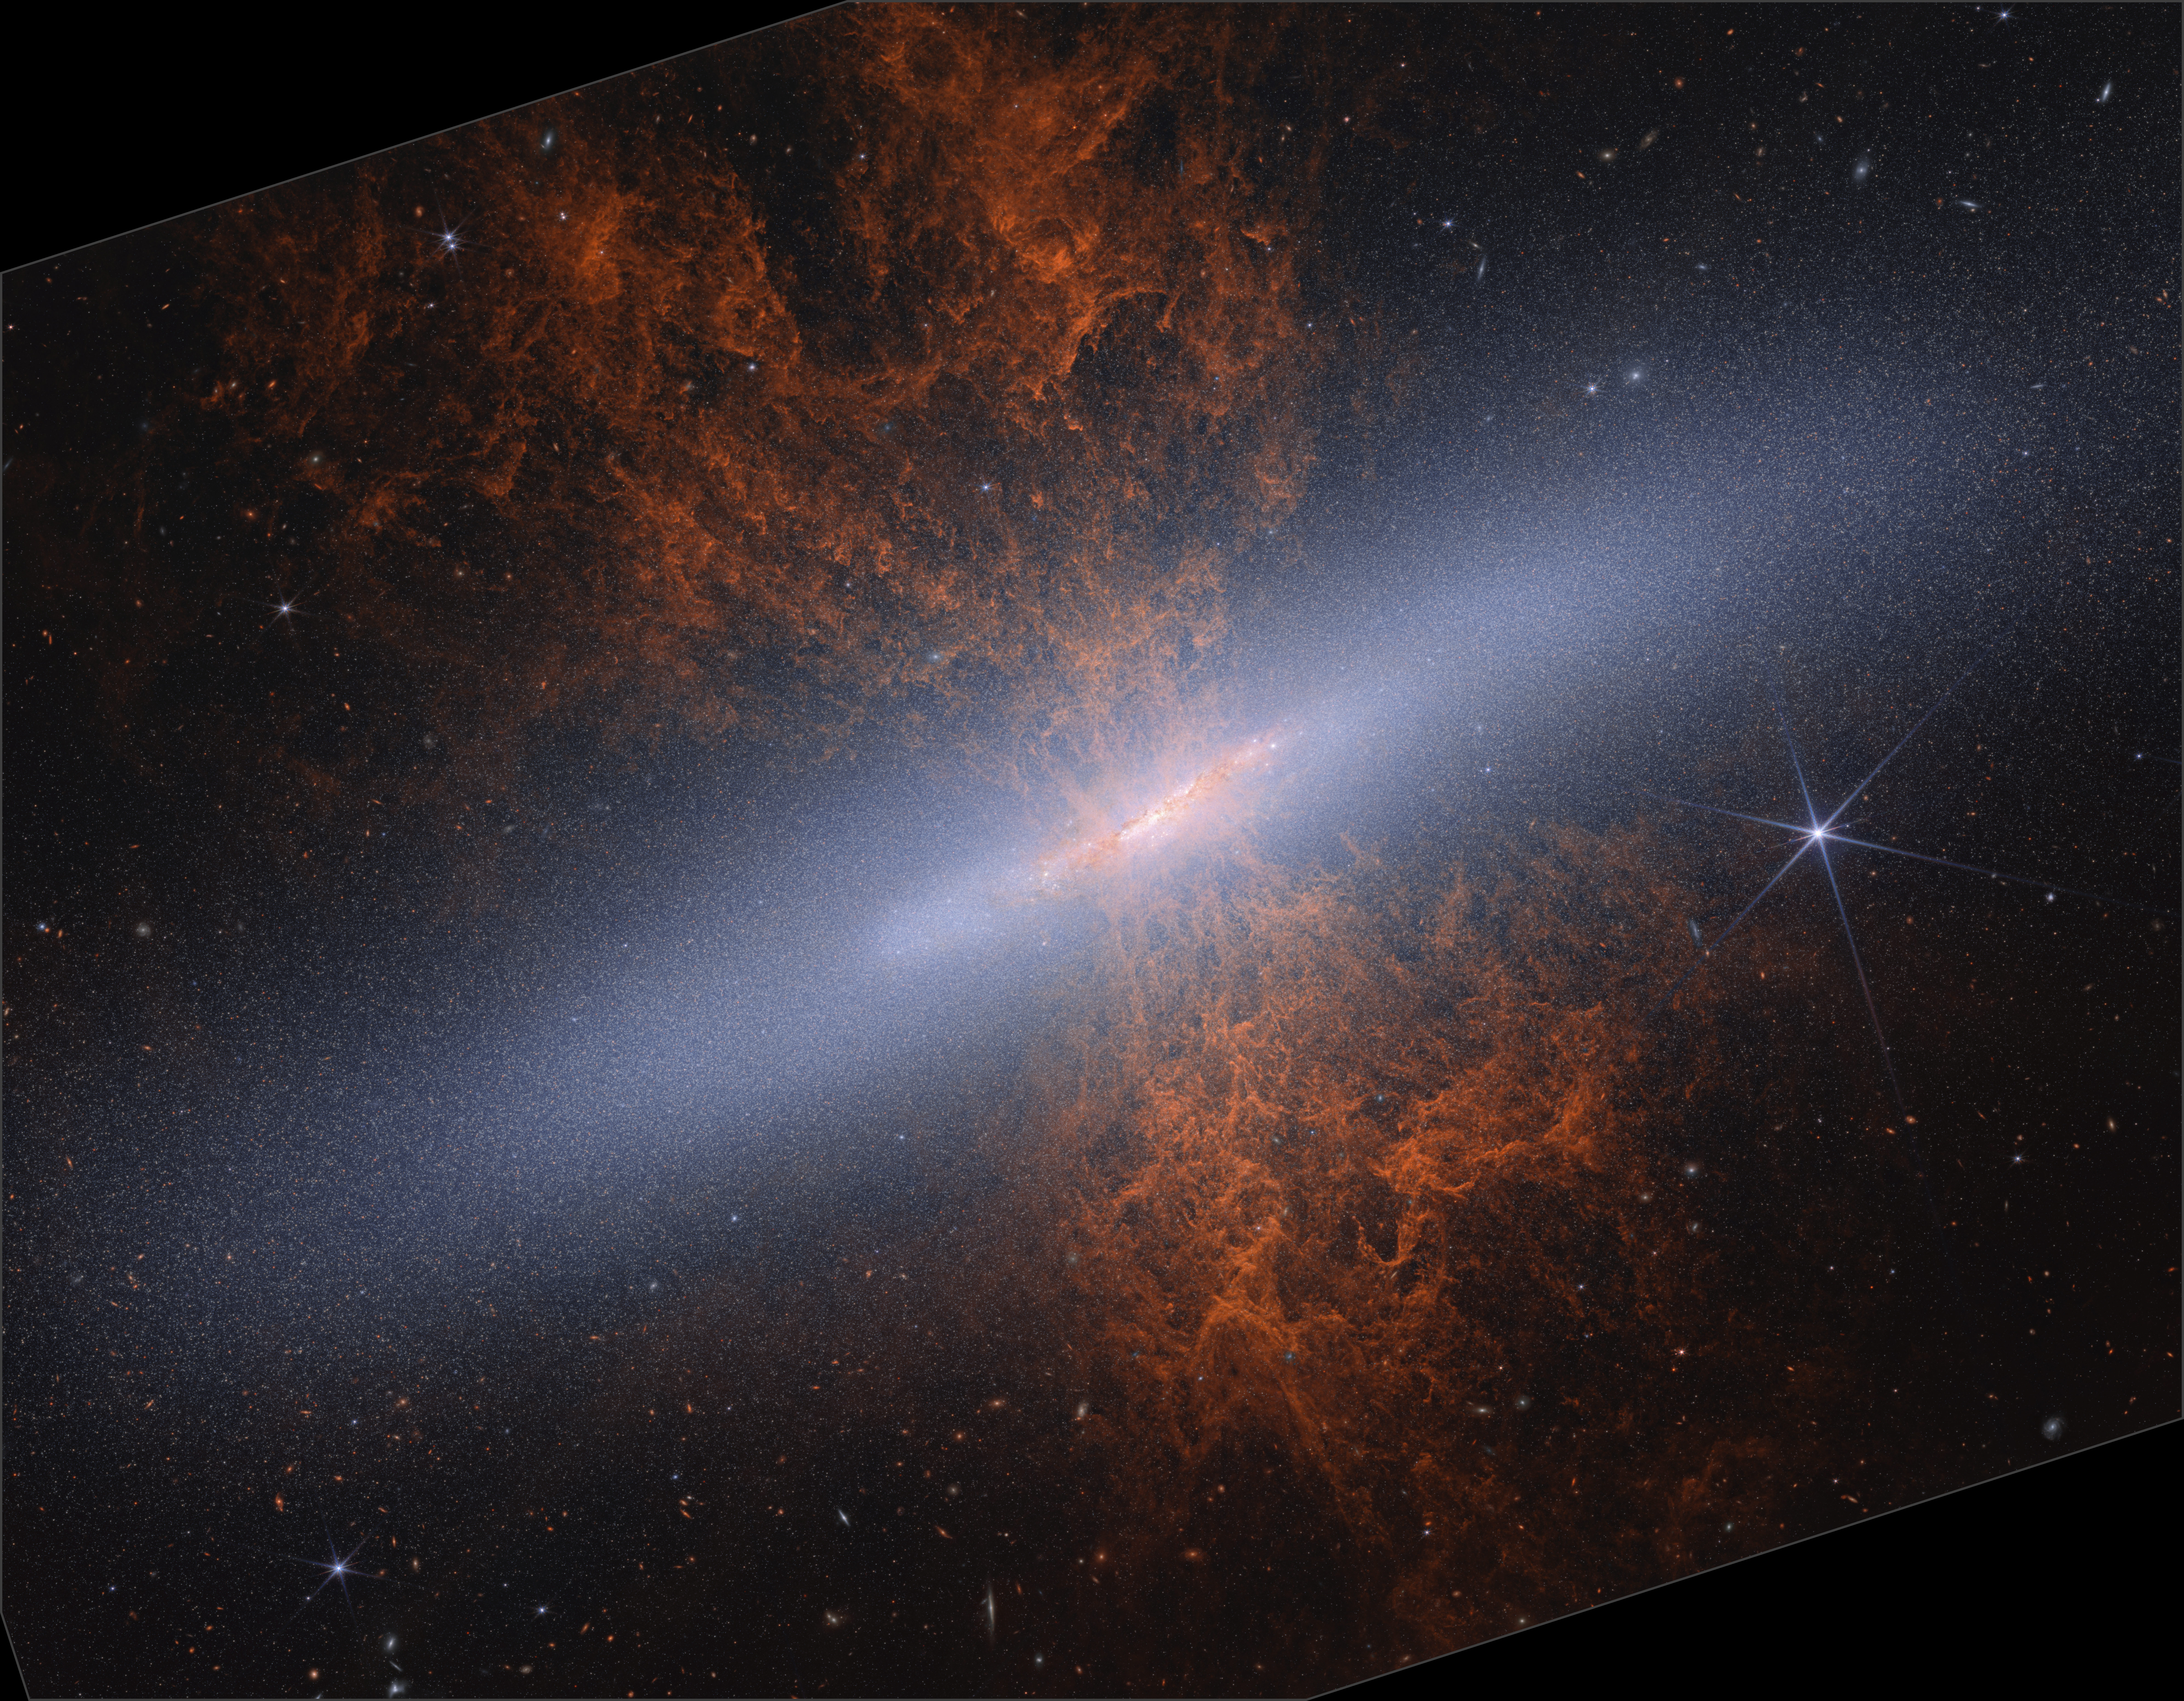

M82 (Webb NIRCam image)

The NASA/ESA/CSA James Webb Space Telescope recently observed edge-on starburst galaxy Messier 82 (M82), nicknamed the Cigar Galaxy. Webb’s near-infrared-light view is a snapshot in time, revealing a scene that has been evolving over a couple hundred million years. In near-infrared light, astronomers can see the galaxy’s distended disc structure and millions of individual stars (approximately 16.5 million) for the first time.

Webb’s imaging survey of the galaxy is helping astronomers investigate the formation history of M82 and will also shed light on the current processes occurring within the starburst galaxy.

You can learn more about this image here.

Credit: NASA, ESA, CSA, A. Smercina (STScI), T. Williams (University of Manchester). Image processing: A. Pagan (STScI).